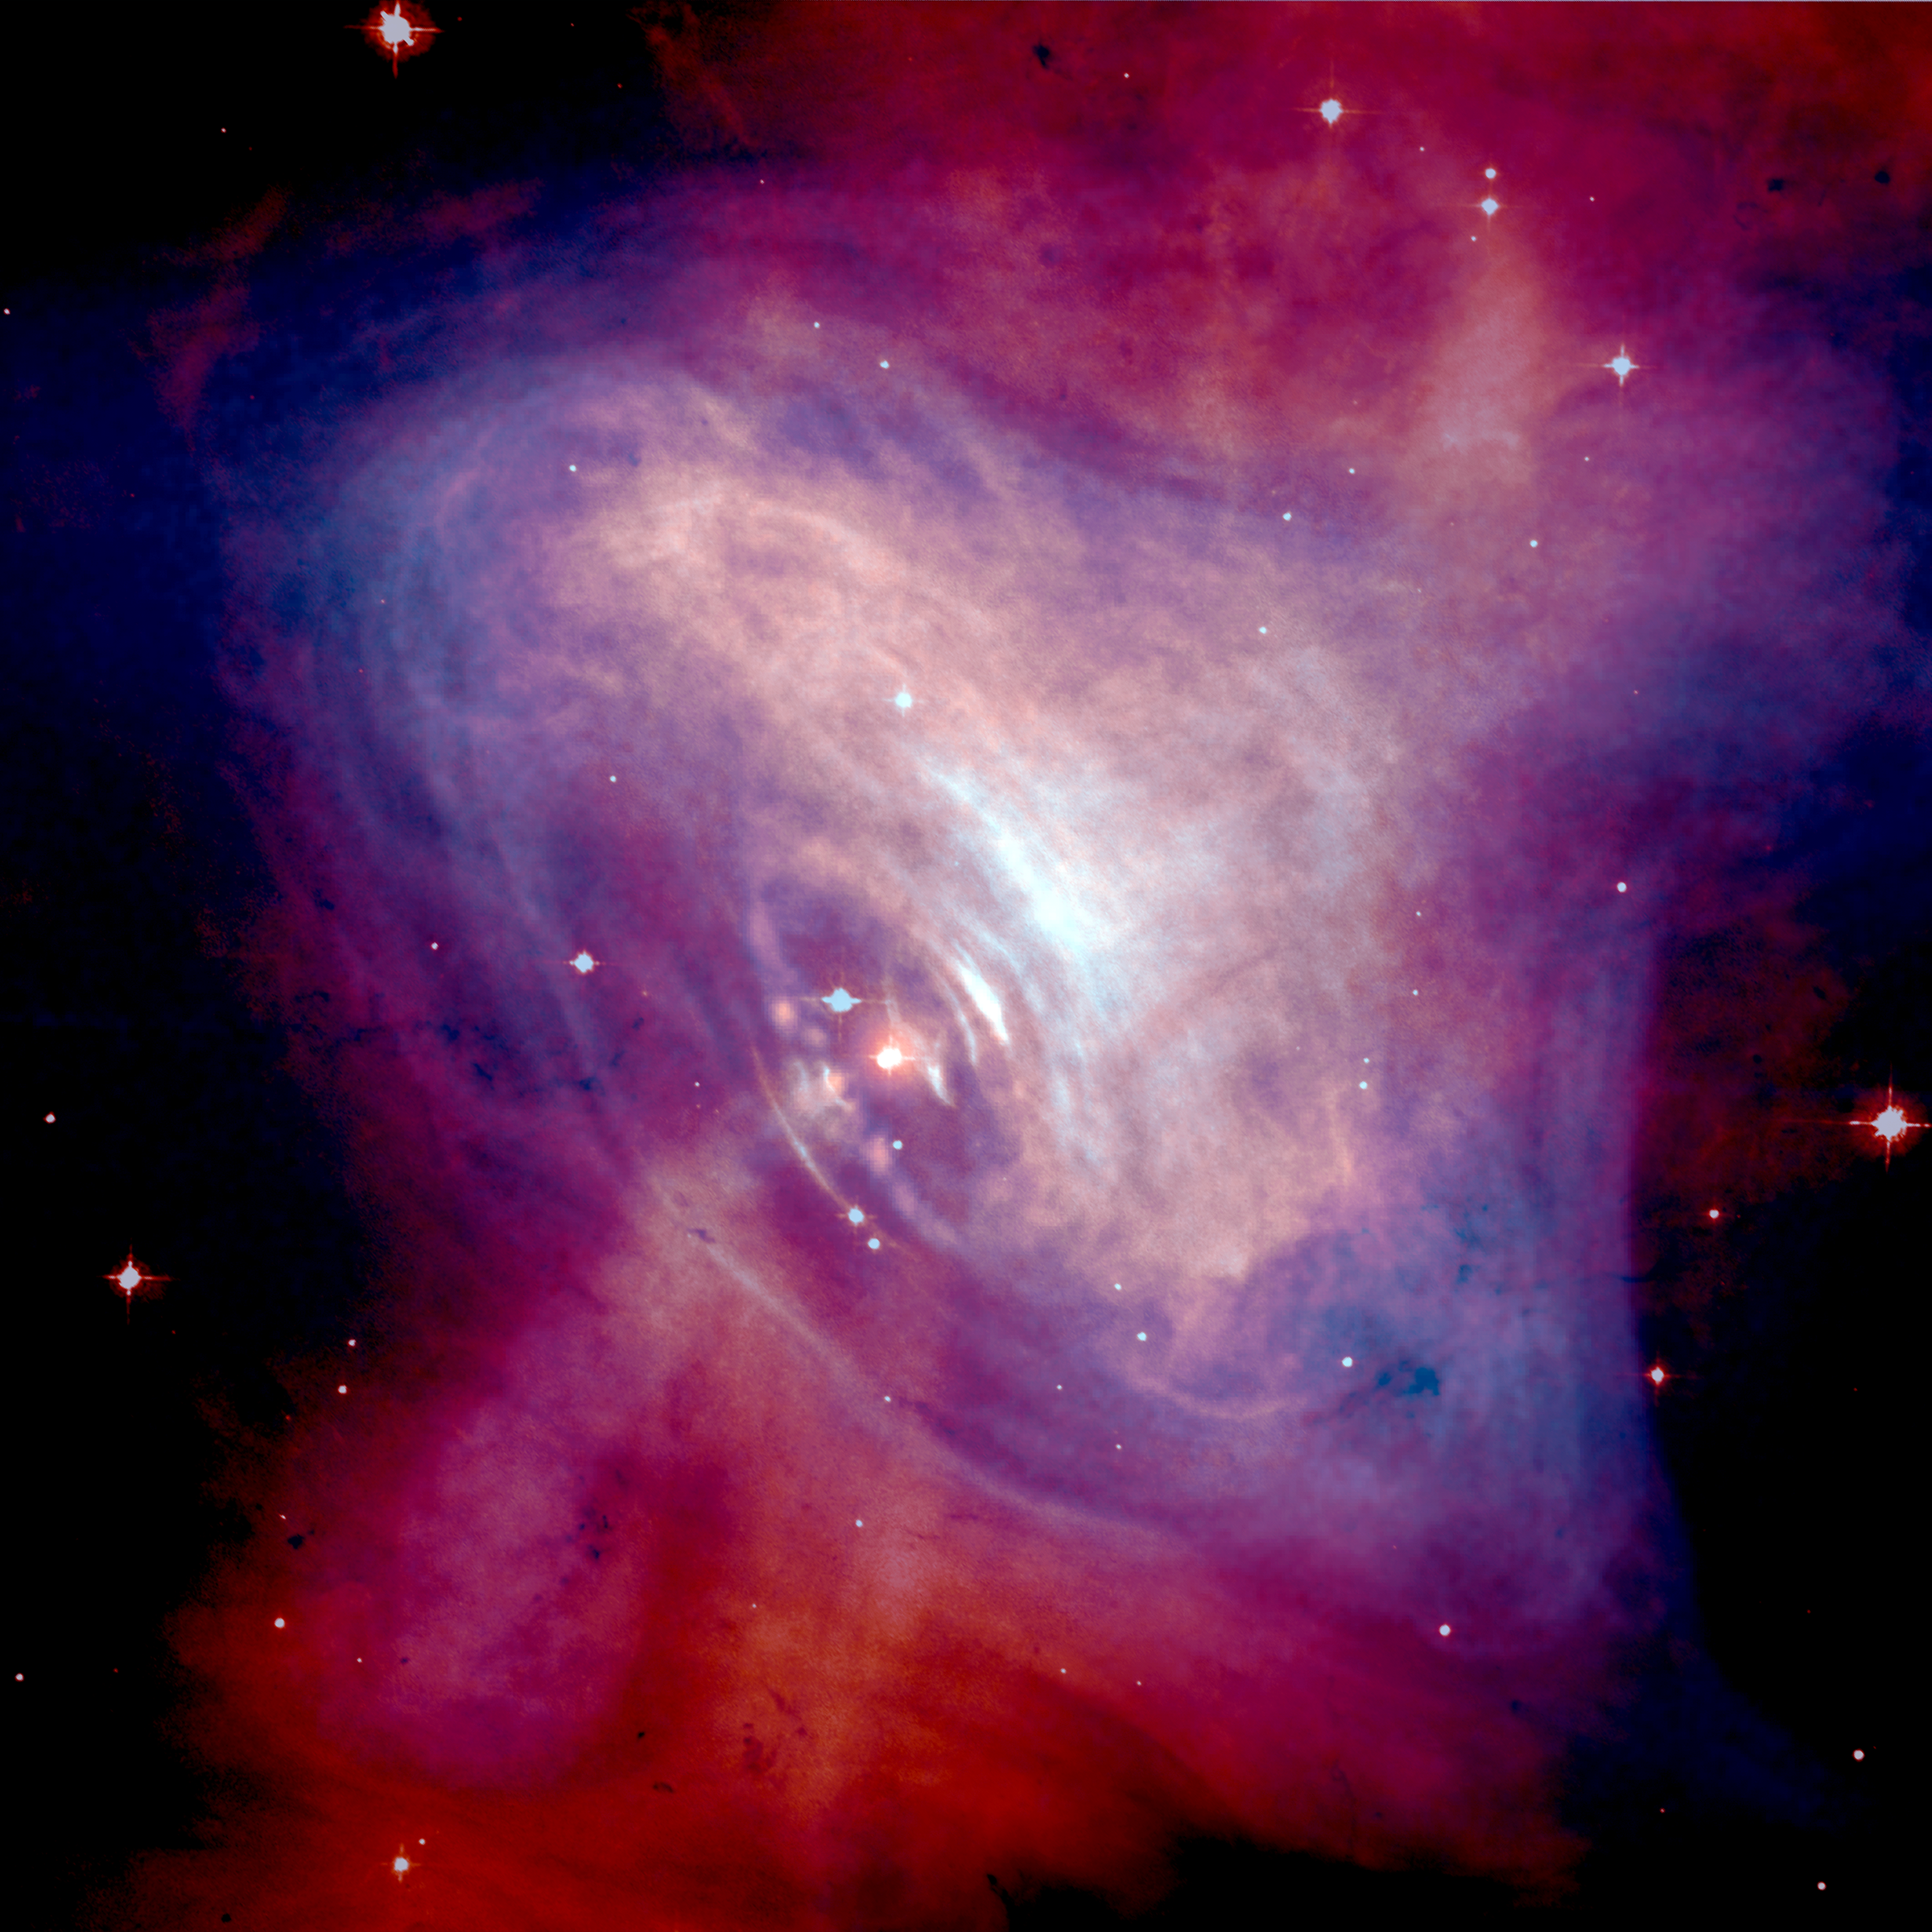

Space Movie Reveals Shocking Secrets of the Crab Pulsar

Just when it seemed like the summer movie season had ended, two of NASA's Great Observatories have produced their own action movie. Multiple observations made over several months with NASA's Chandra X-ray Observatory and the Hubble Space Telescope captured the spectacle of matter and antimatter propelled to near the speed of light by the Crab pulsar, a rapidly rotating neutron star the size of Manhattan.

Credit: NASA/CXC/ASU/J. Hester et al., HST/ASU/J. Hester et al.